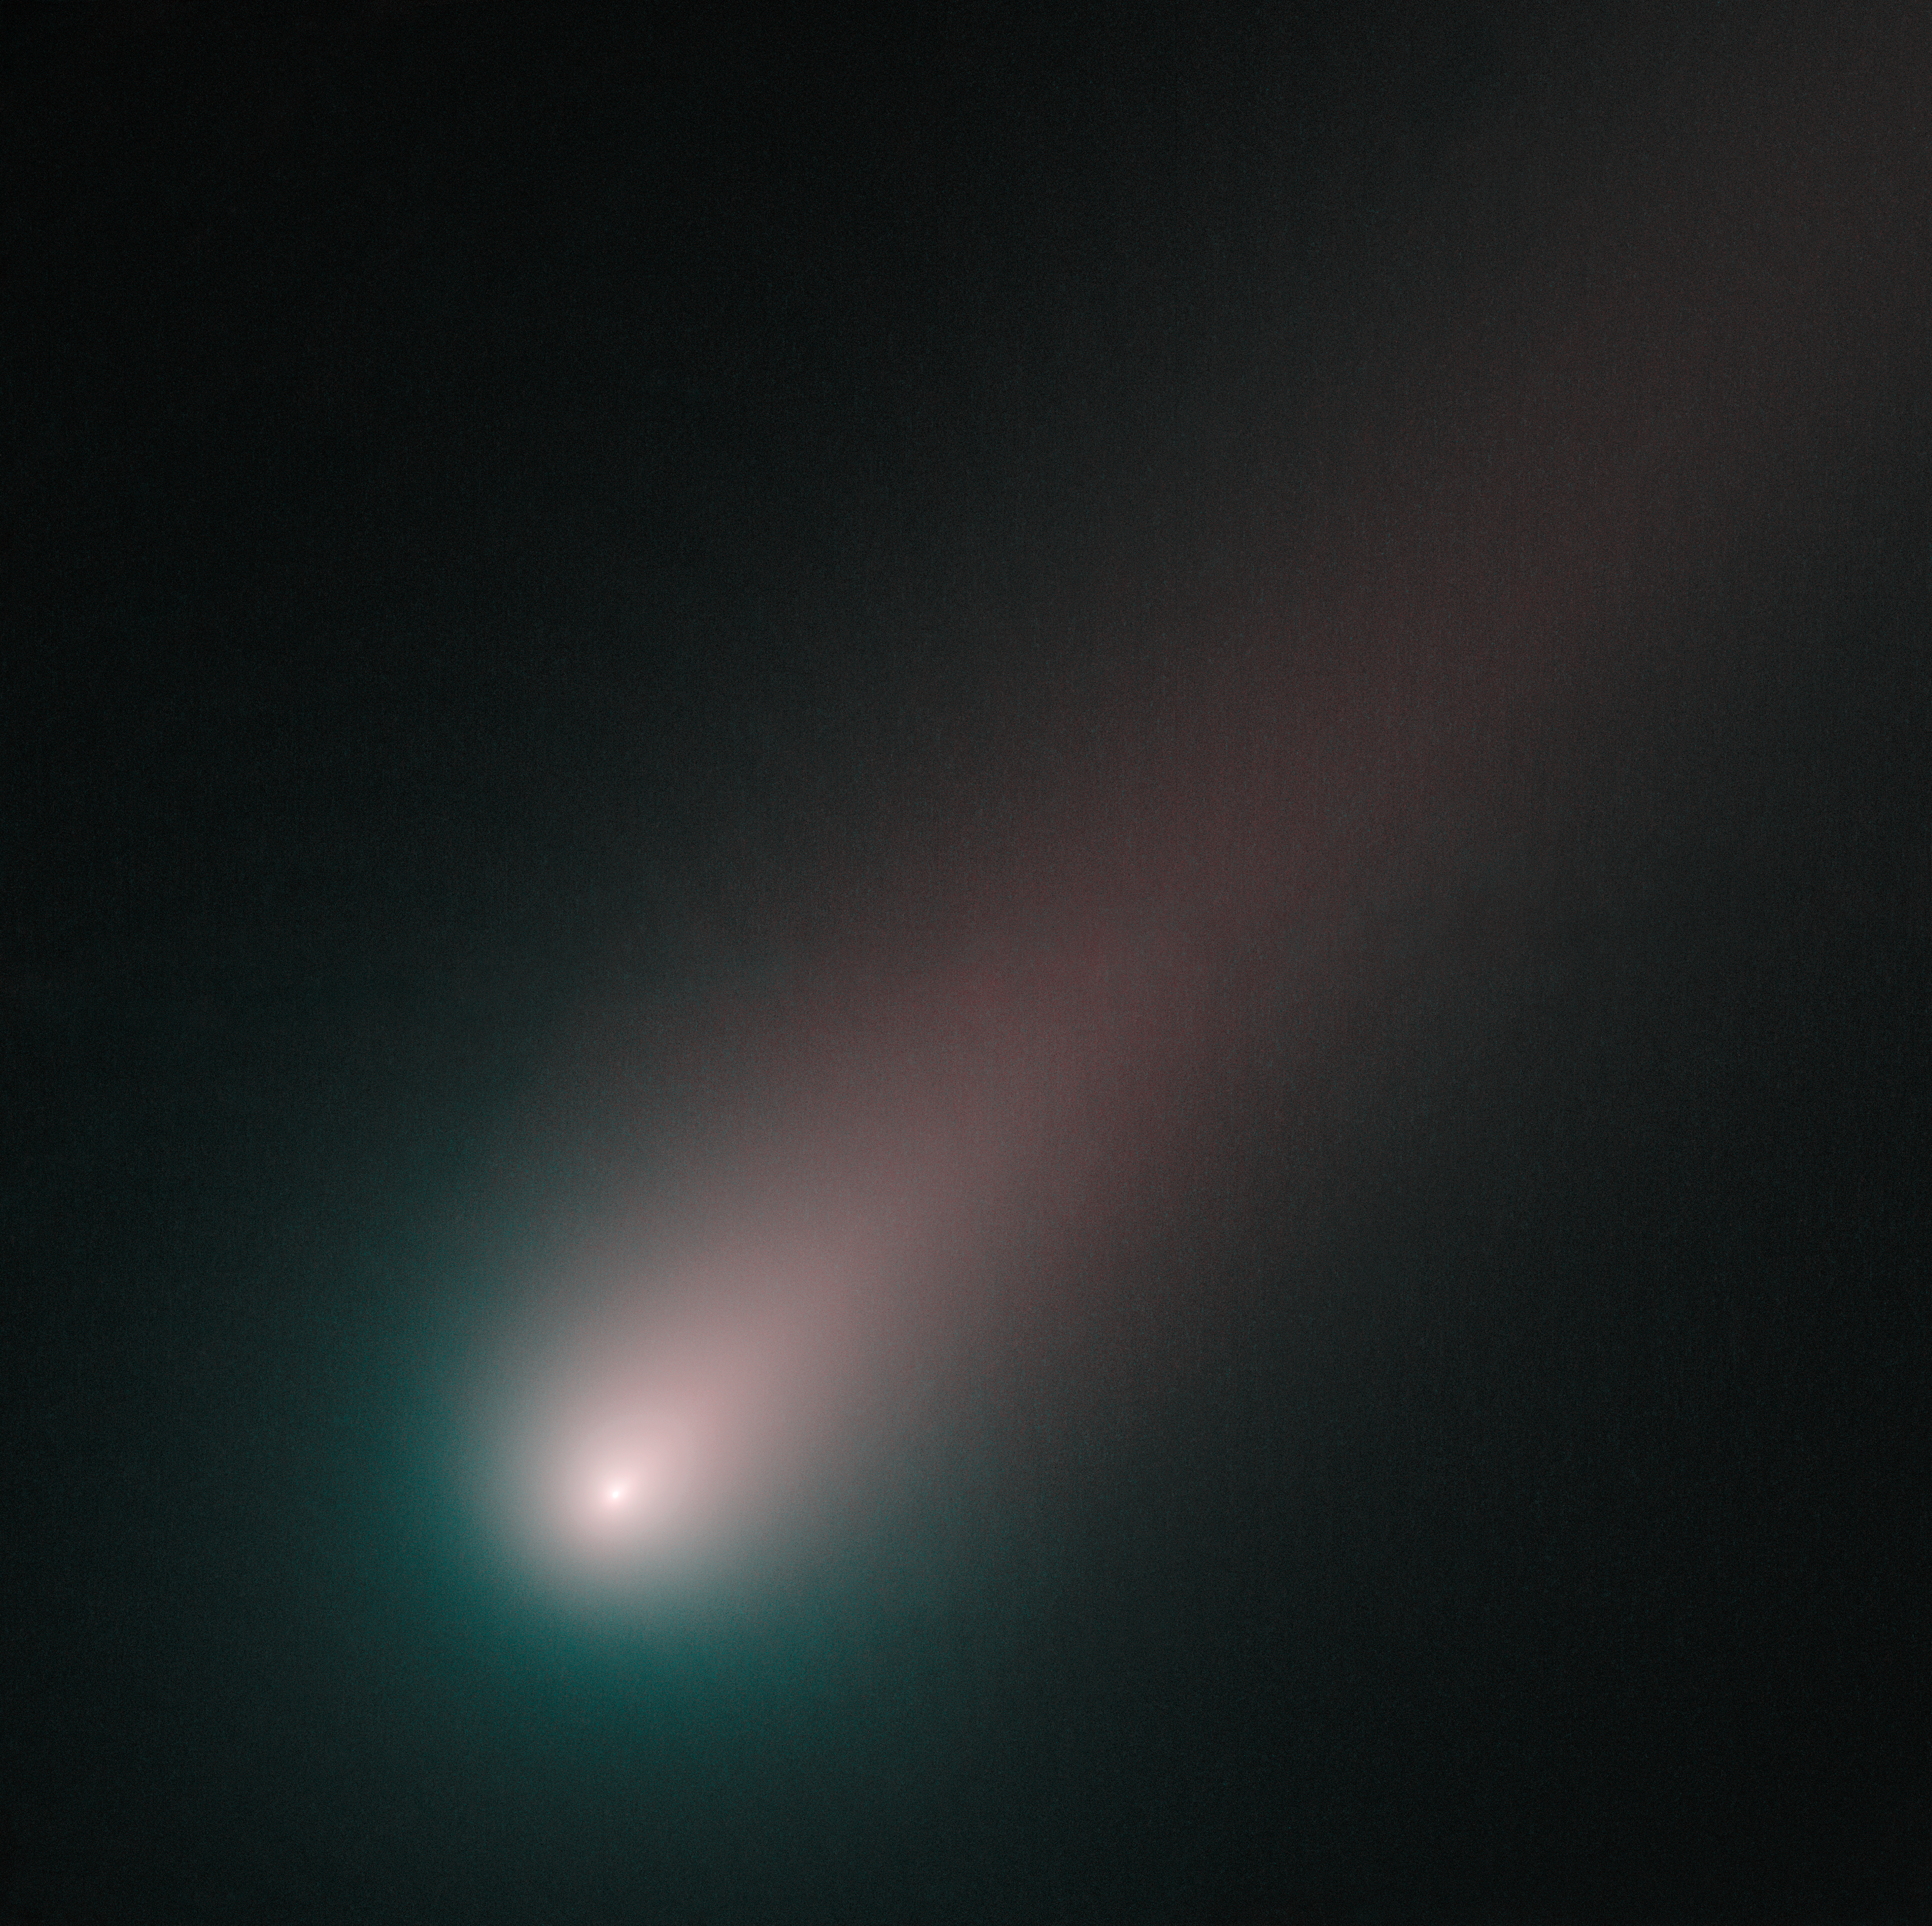

Hubble's last look at Ccomet ISON before perihelion

As of mid-November, ISON is officially upon us. Hubble has taken its closest look yet at the innermost region of the comet, where geysers of sublimating ice are fueling a spectacular tail.

Made from observations on 2 November 2013, the image combines pictures of ISON taken through blue and red filters. The round coma around ISON's nucleus is blue and the tail has a redder hue. Ice and gas in the coma reflect blue light from the Sun, while dust grains in the tail reflect more red light than blue light. This is the most colour separation seen so far in ISON and the comet, nearer than ever to the Sun, is brighter and more structured than ever before.

Comet ISON will come closest to the Sun on November 28, a point in its orbit known as perihelion. Comet ISON was fairly quiet until 1 November 2013, when it experienced an outburst that doubled the amount of gas the comet emitted. After this image was taken, a second outburst shook the comet, increasing its activity by a factor of ten. Over the past couple of nights, the comet has stabilised at its new level of activity.

It is now bright enough to be seen with a good pair of binoculars from a dark site, in the morning skies towards the East.

Hubble Heritage release
ISONblog, an online source offering analysis of Comet ISON by Hubble Space Telescope astronomers and staff at the Space Telescope Science Institute in Baltimore, USA.

Credit: NASA, ESA, and the Hubble Heritage Team (STScI/AURA)